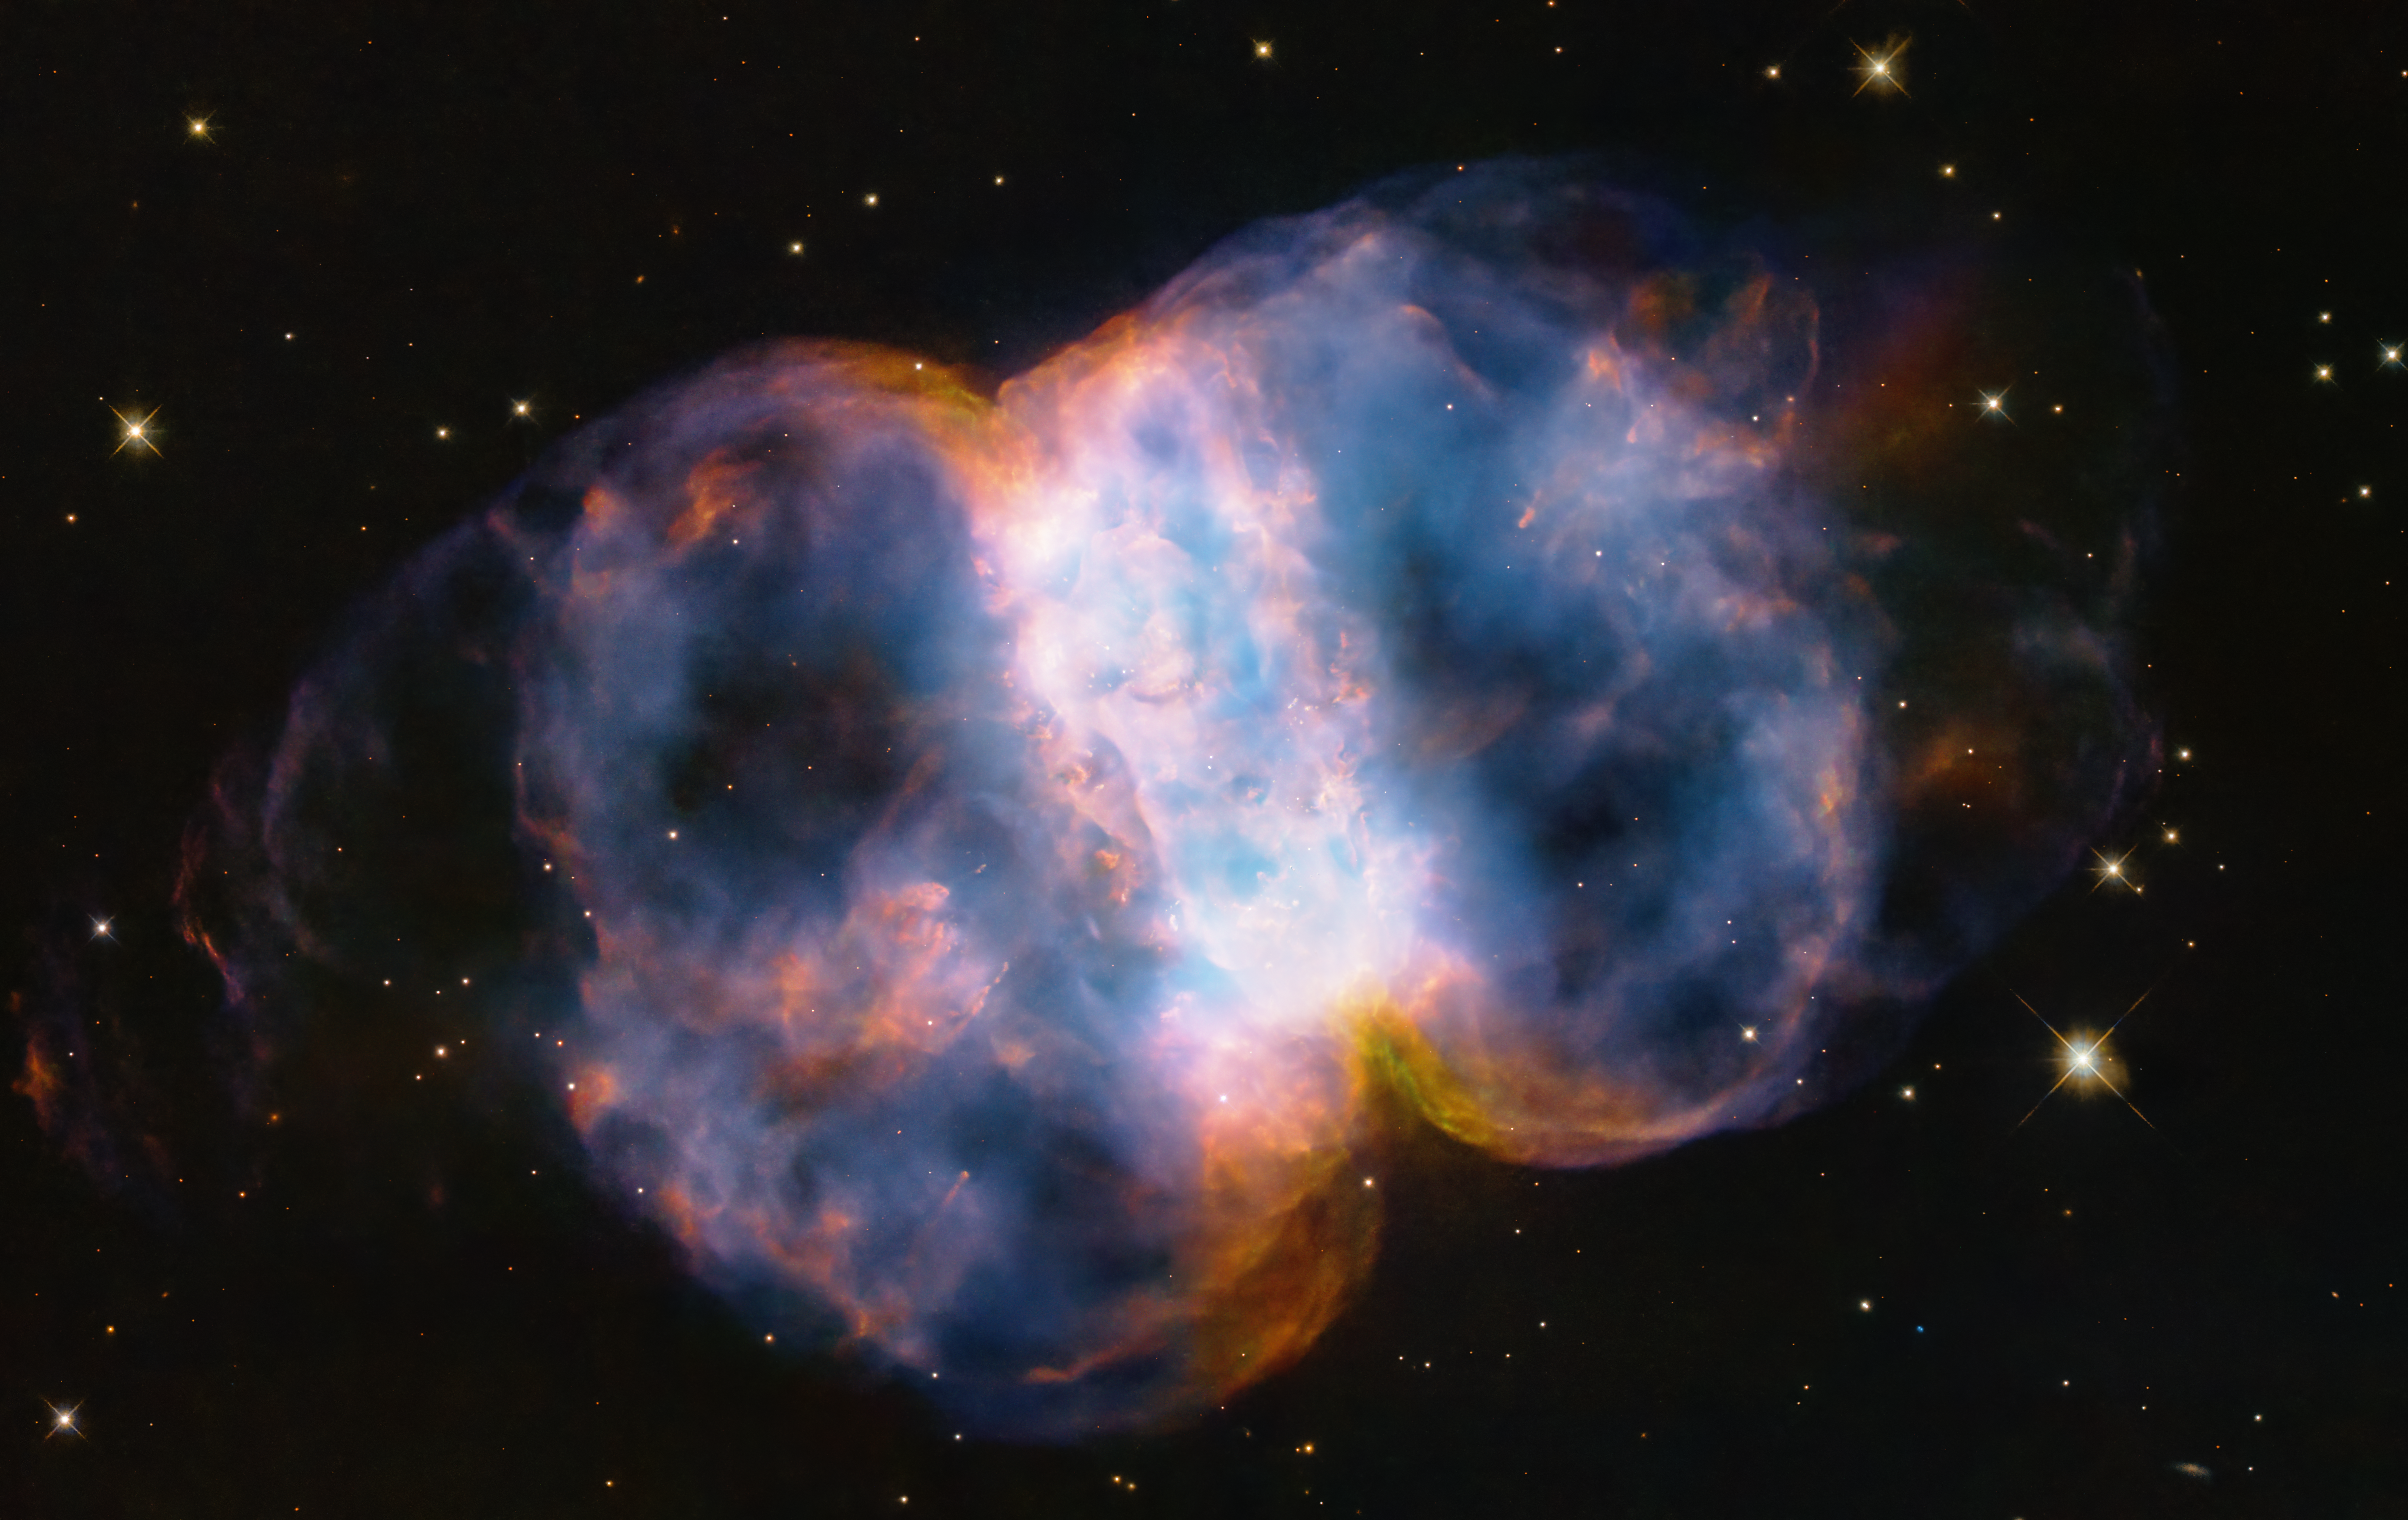

Little Dumbbell Nebula (M76)

In celebration of the 34th anniversary of the launch of the legendary NASA/ESA Hubble Space Telescope, astronomers took a snapshot of the Little Dumbbell Nebula (also known as Messier 76, M76, or NGC 650/651) located 3400 light-years away in the northern circumpolar constellation Perseus. The photogenic nebula is a favourite target of amateur astronomers.

M76 is classified as a planetary nebula. This is a misnomer because it is unrelated to planets. But its round shape suggested it was a planet to astronomers who first viewed it through low-power telescopes. In reality, a planetary nebula is an expanding shell of glowing gases that were ejected from a dying red giant star. The star eventually collapses to an ultra-dense, hot white dwarf.

M76 is composed of a ring, seen edge-on as the central bar structure, and two lobes on either opening of the ring. Before the star burned out, it ejected the ring of gas and dust. The ring was probably sculpted by the effects of the star that once had a binary companion star. This sloughed-off material created a thick disc of dust and gas along the plane of the companion’s orbit. The hypothetical companion star isn’t seen in the Hubble image, and so it could have been later swallowed by the central star. The disc would be forensic evidence for that stellar cannibalism.

The primary star is collapsing to form a white dwarf. It is one of the hottest stellar remnants known at a scorching 120 000 degrees Celsius, 24 times our Sun’s surface temperature. The sizzling white dwarf can be seen as a pinpoint in the centre of the nebula. A star visible in projection beneath it is not part of the nebula.

Pinched off by the disc, two lobes of hot gas are escaping from the top and bottom of the ‘belt’ along the star’s rotation axis that is perpendicular to the disc. They are being propelled by the hurricane-like outflow of material from the dying star, tearing across space at two million miles per hour. That’s fast enough to travel from Earth to the Moon in a little over seven minutes! This torrential ‘stellar wind’ is ploughing into cooler, slower-moving gas that was ejected at an earlier stage in the star’s life, when it was a red giant. Ferocious ultraviolet radiation from the super-hot star is causing the gases to glow. The red colour is from nitrogen, and blue is from oxygen.

The entire nebula is a flash in the pan by cosmological timekeeping. It will vanish in about 15 000 years.

Credit: NASA, ESA, STScI, A. Pagan (STScI)